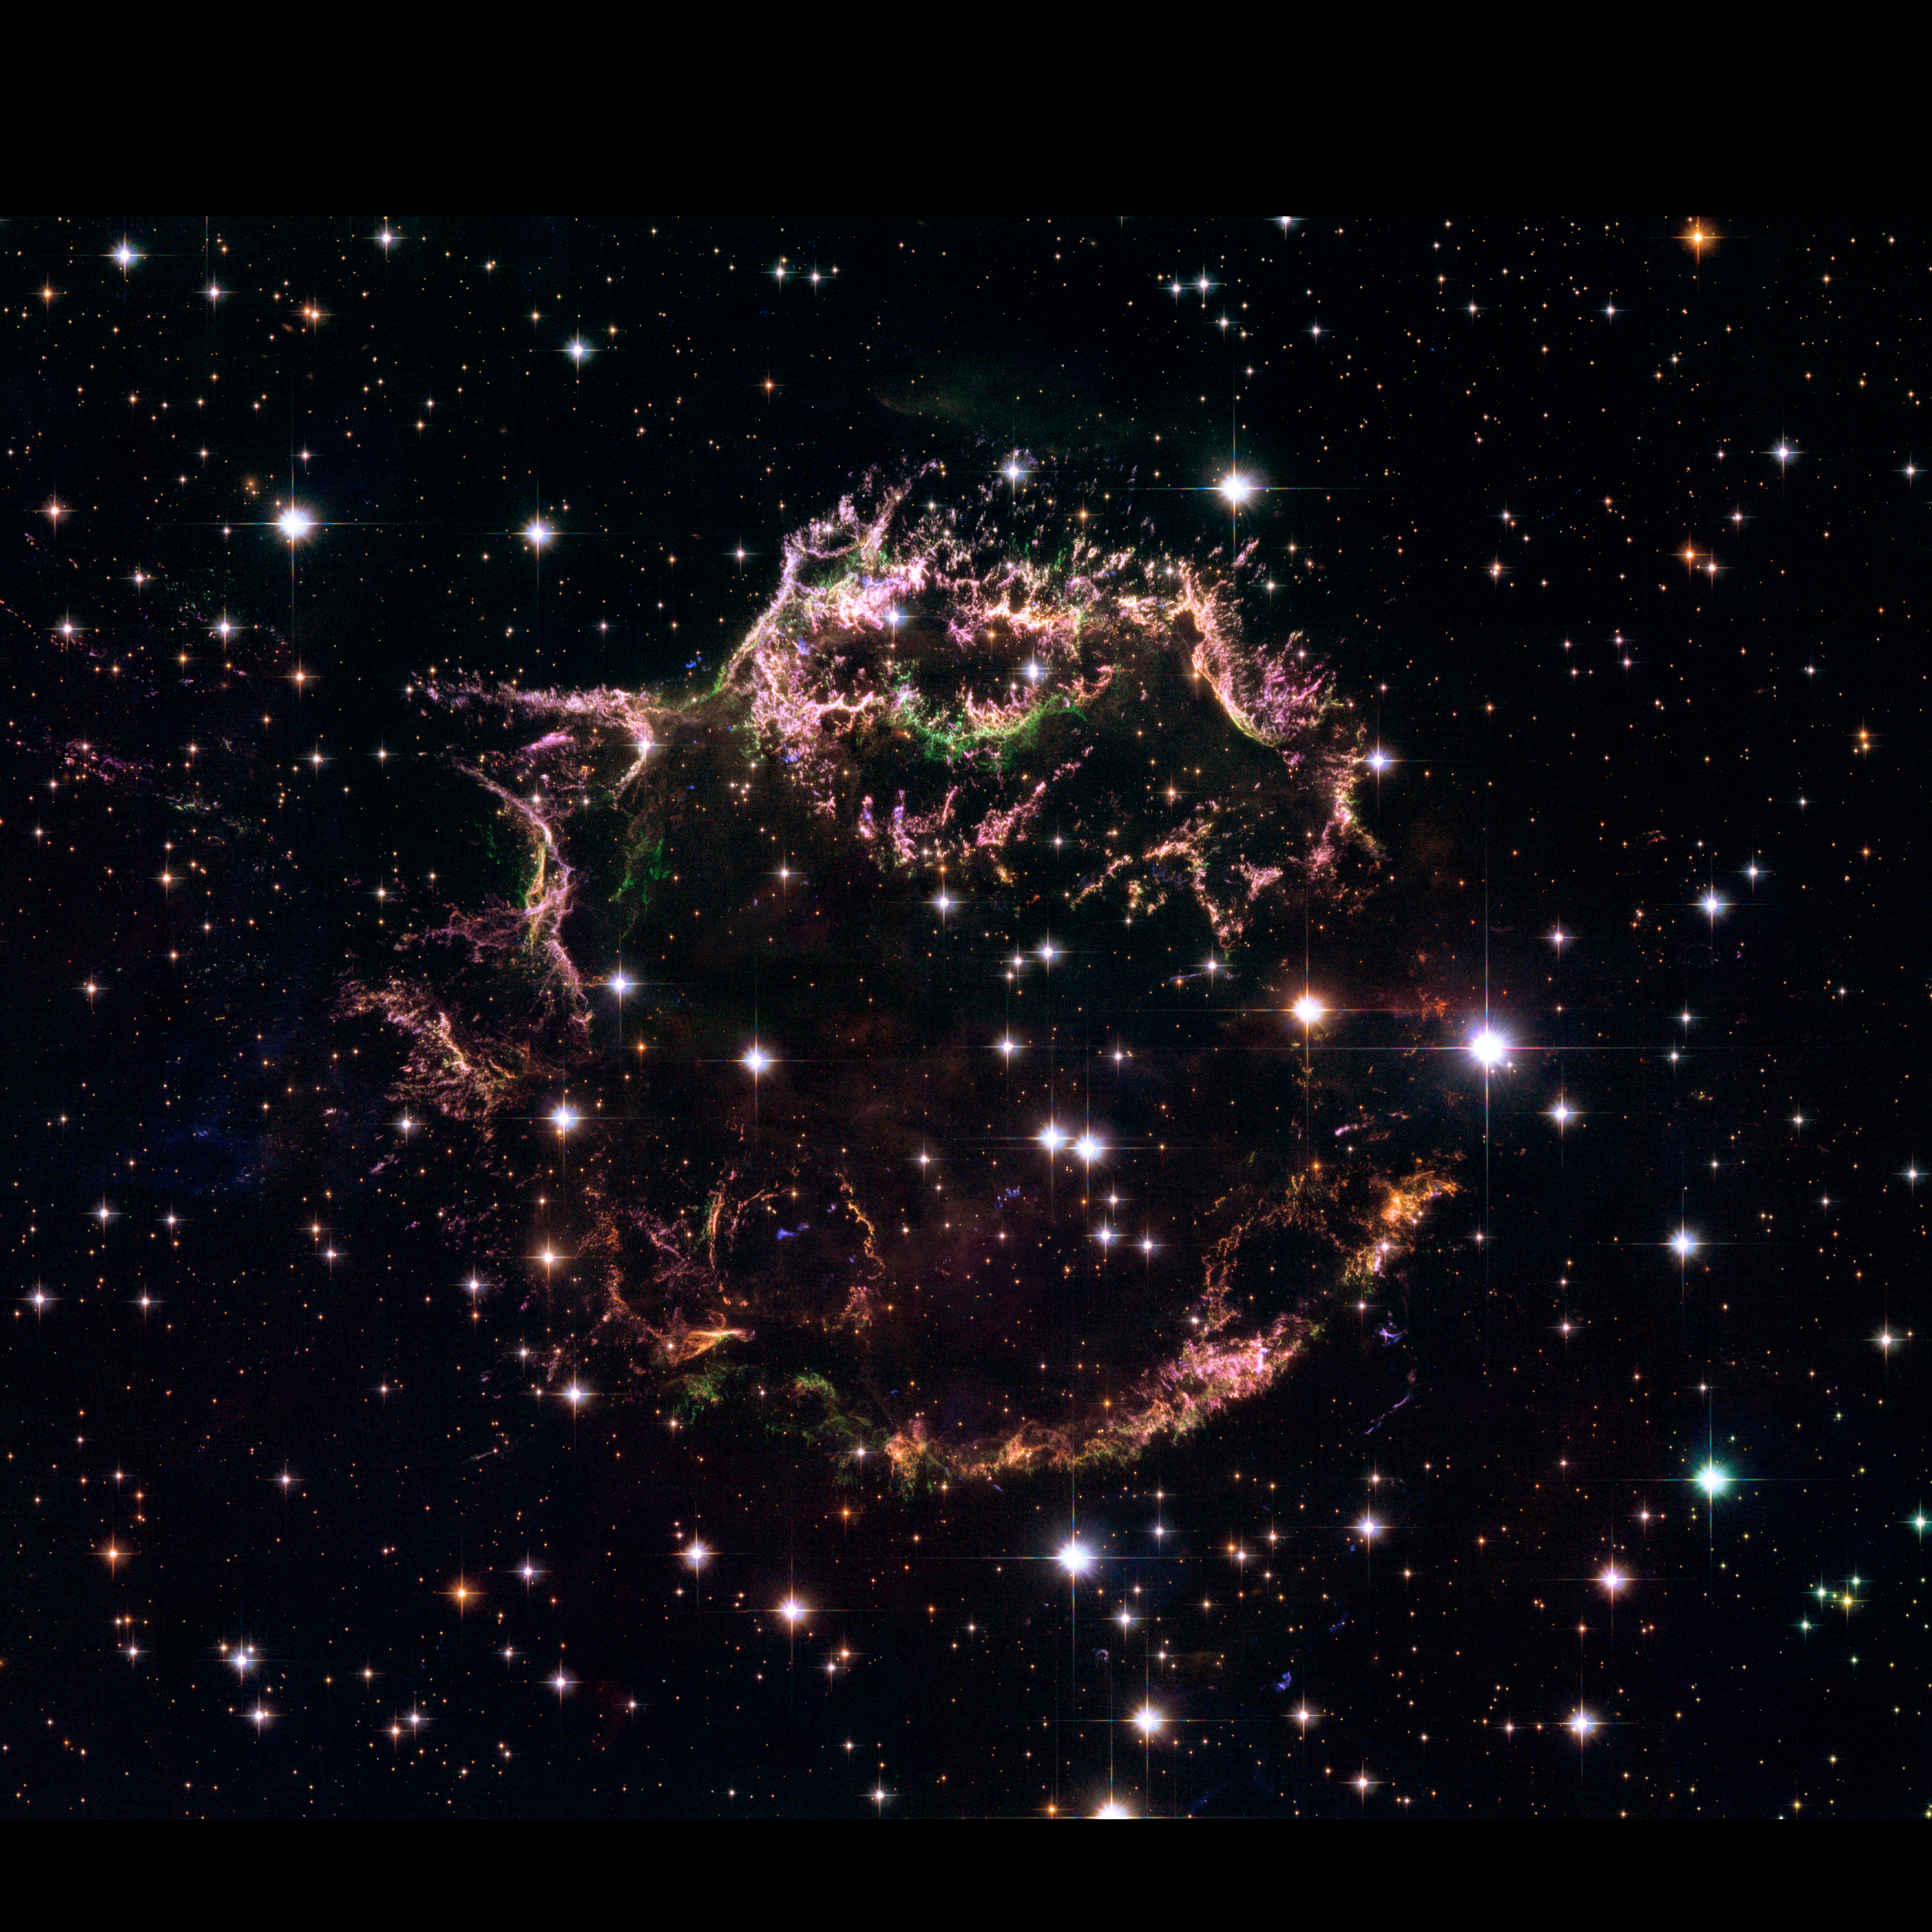

Hubble’s view of Cassiopeia A

This is an image taken with the NASA/ESA Hubble Space Telescope that provides a detailed look at the tattered remains of a supernova explosion known as Cassiopeia A (Cas A). The image shows the complex and intricate structure of the star's shattered fragments.

This image was captured in 2004.

Credit: NASA, ESA, and the Hubble Heritage (STScI/AURA)-ESA/Hubble Collaboration. Acknowledgement: R. A. Fesen (Dartmouth College, USA) and J. Long (ESA/Hubble